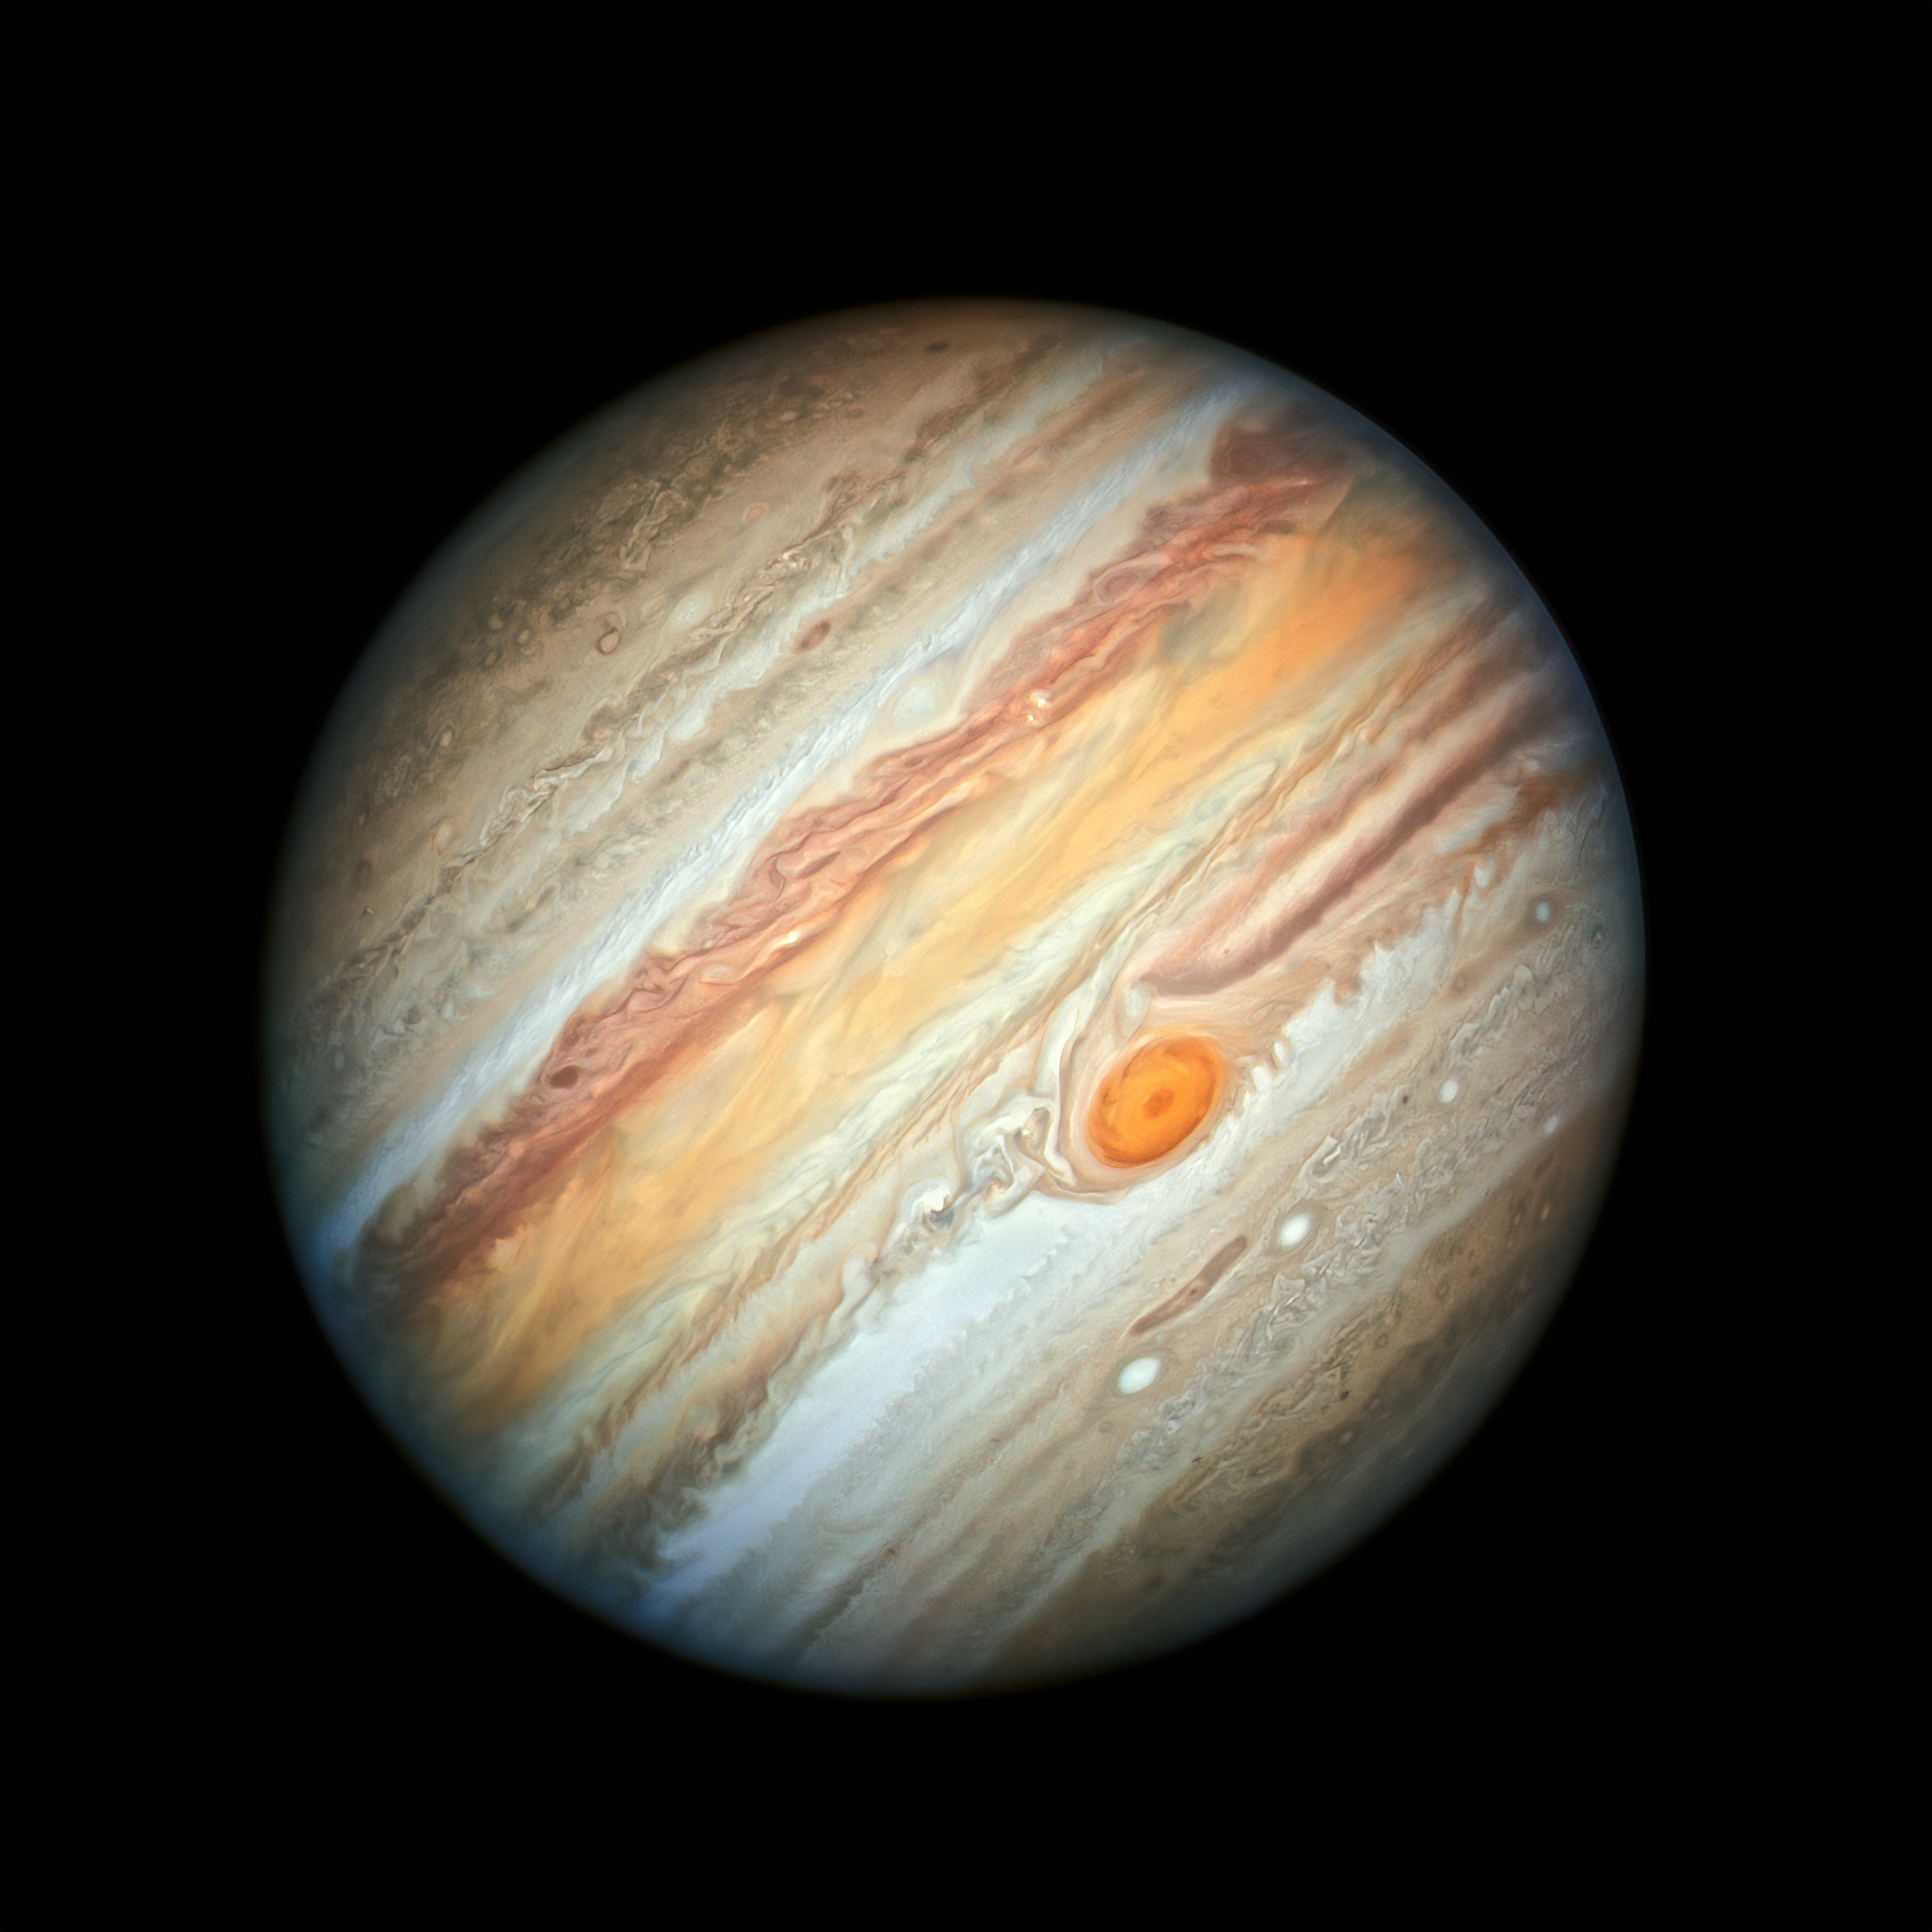

Jupiter’s Colourful Palette

The NASA/ESA Hubble Space Telescope reveals the intricate, detailed beauty of Jupiter’s clouds in this new image taken on 27 June 2019 by Hubble’s Wide Field Camera 3, when the planet was 644 million kilometres from Earth — its closest distance this year. The image features the planet’s trademark Great Red Spot and a more intense colour palette in the clouds swirling in the planet’s turbulent atmosphere than seen in previous years.

The observations of Jupiter form part of the Outer Planet Atmospheres Legacy (OPAL) programme.

Credit: NASA, ESA, A. Simon (Goddard Space Flight Center), and M.H. Wong (University of California, Berkeley)